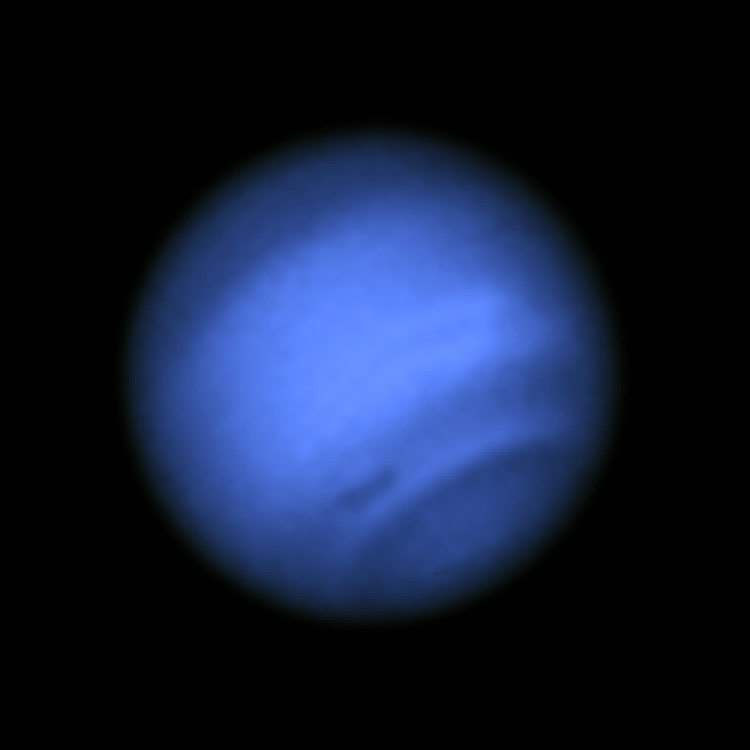

Image with dark spot (blue light)

This new image taken with the NASA/ESA Hubble Space Telescope confirms the presence of a dark vortex in the atmosphere of Neptune. The full visible-light image at left shows that the dark feature resides near and below a patch of bright clouds in the planet's southern hemisphere. The dark spot measures roughly 4,800 kilometers across. Other high-altitude clouds can be seen at the planet's equatorial region and polar regions.

The image shows that Neptune's dark vortices are typically best seen at blue wavelengths. Only Hubble has the high resolution required for identifying such weather features on distant Neptune.

Credit: NASA, ESA, and M.H. Wong and J. Tollefson (UC Berkeley)